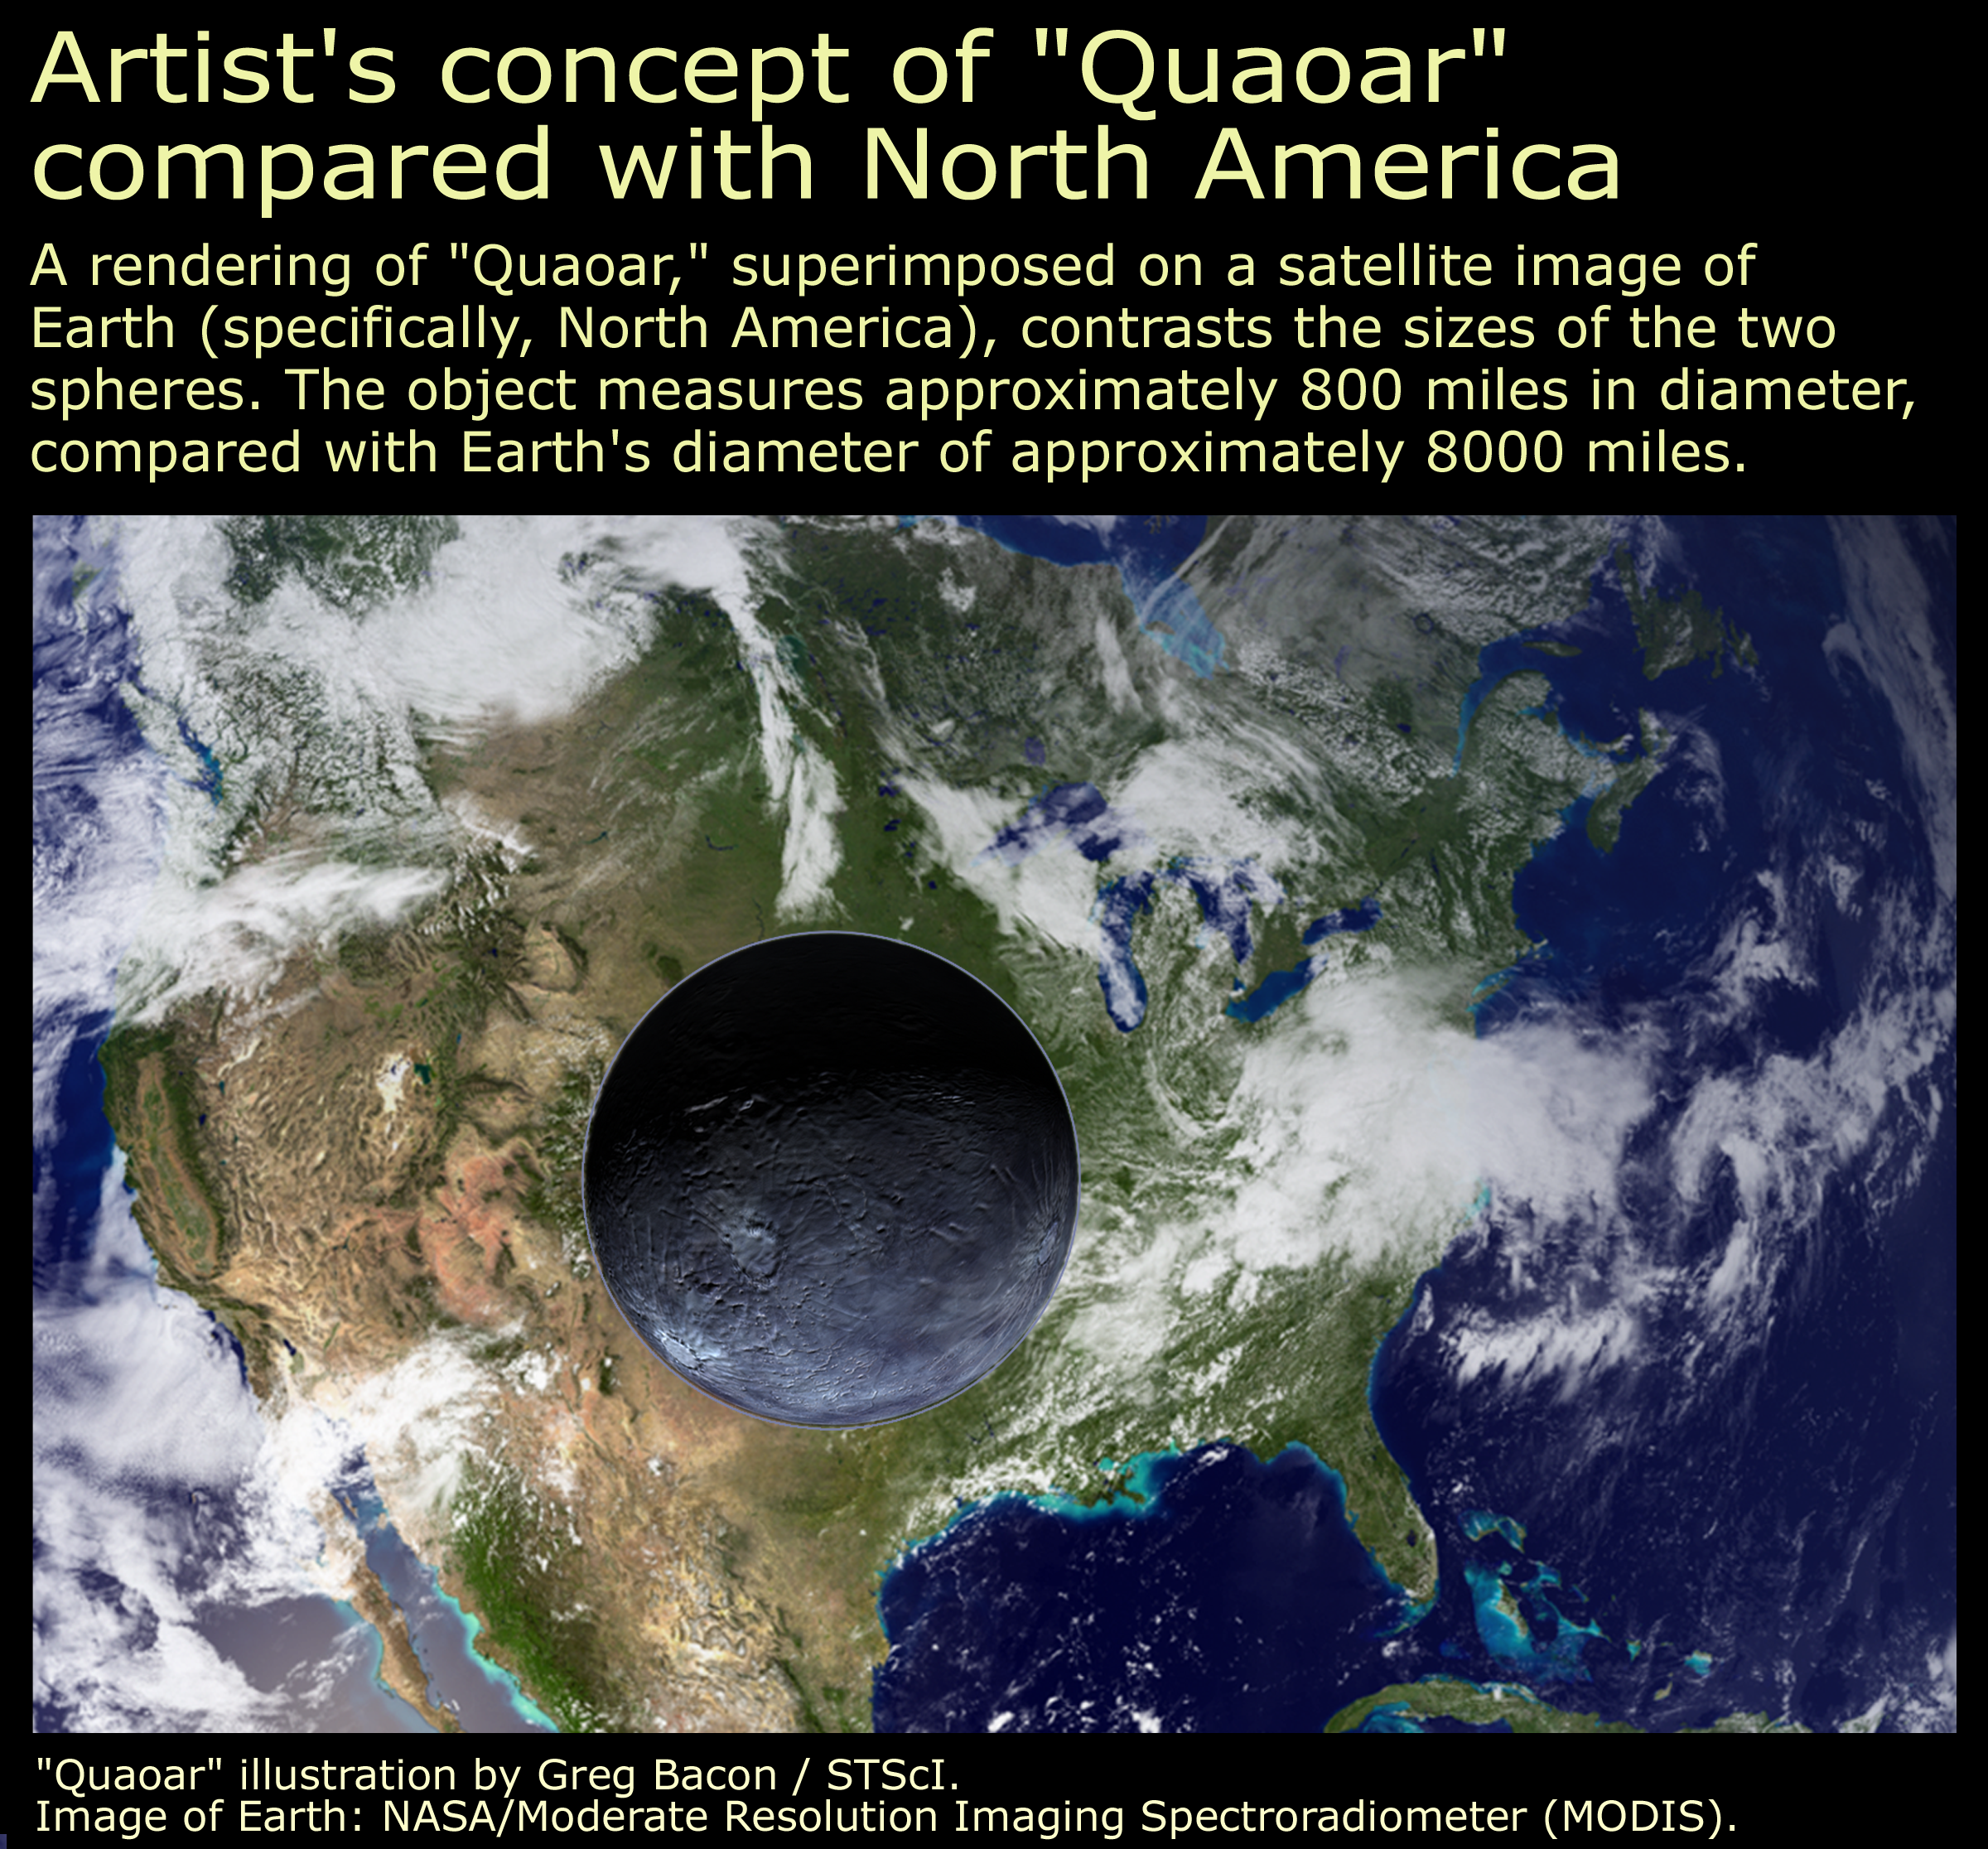

Quaoar's size compared with North America

Approximately half the size of Pluto, the icy world 2002 LM60, dubbed "Quaoar" (pronounced kwa-whar) by its discoverers, is the farthest object in the solar system ever to be resolved by a telescope. The picture above shows its size compared to North America.

Credit: NASA/ESA, A. Feild, and G. Bacon (STScI)